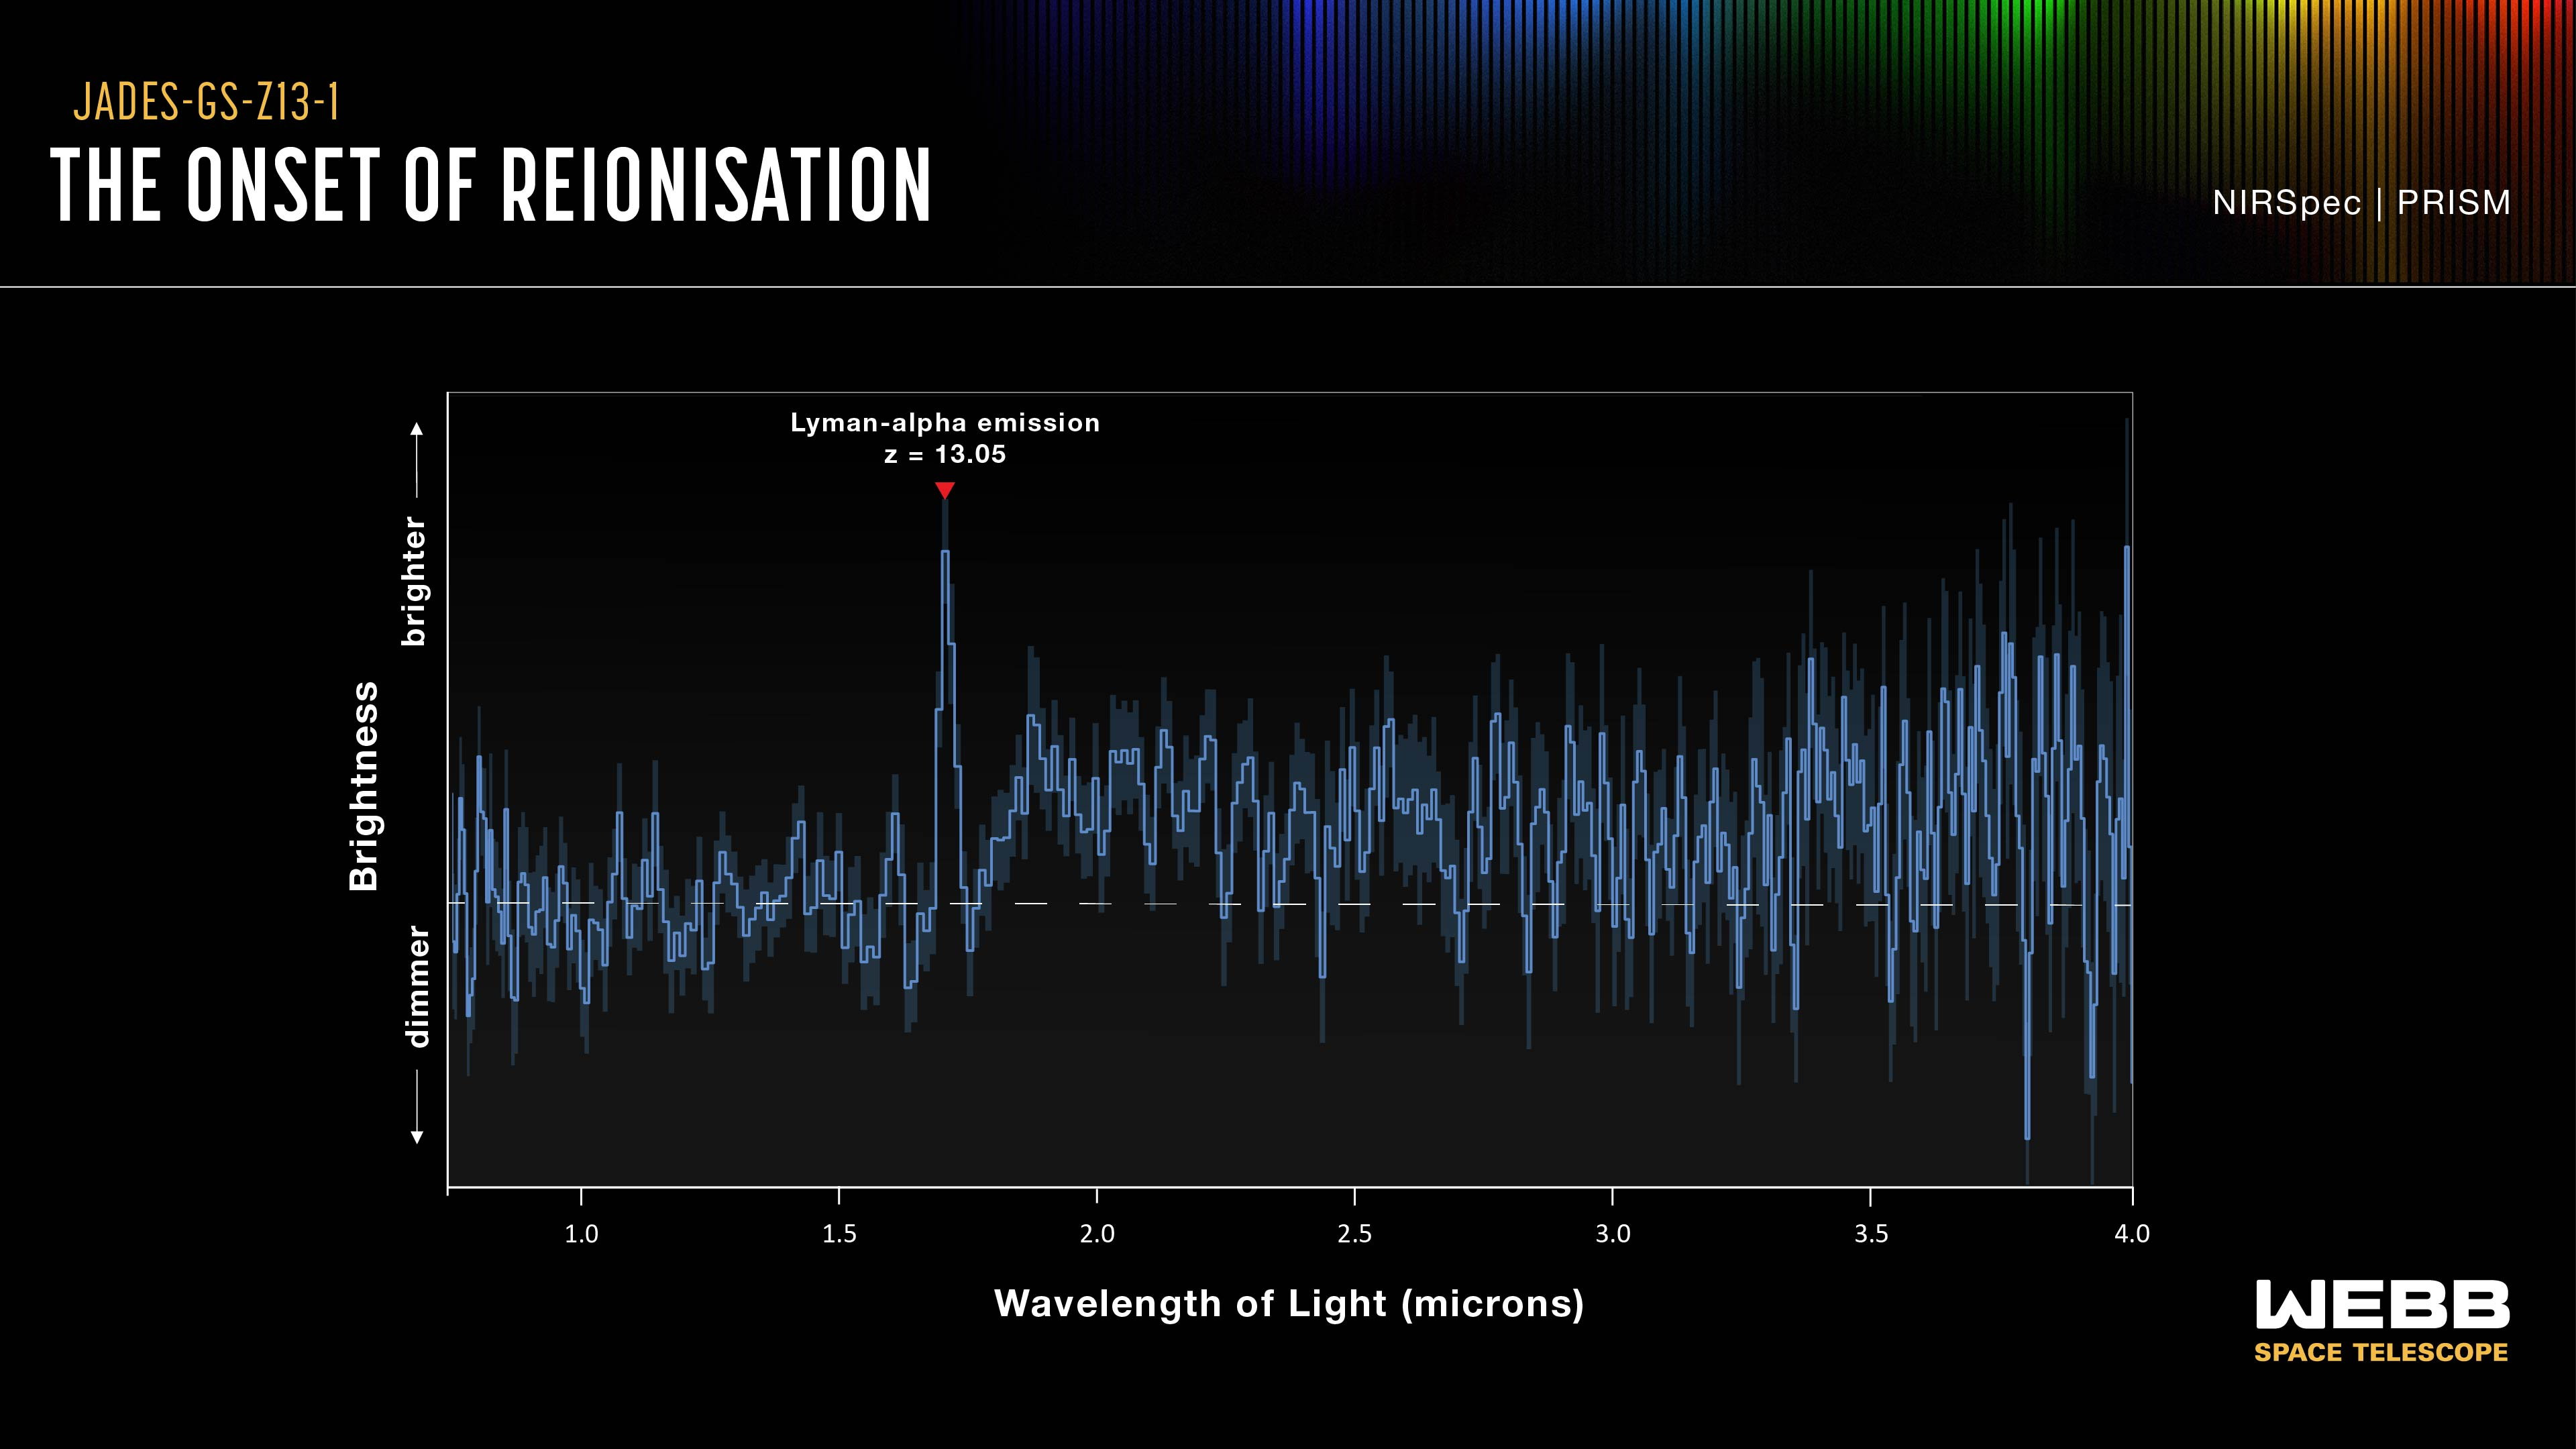

JADES-GS-z13-1 spectrum graphic

The incredibly distant galaxy GS-z13-1, observed just 330 million years after the Big Bang, was initially discovered with deep imaging from the NASA/ESA/CSA James Webb Space Telescope. Now, an international team of astronomers has definitively identified powerful hydrogen emission from this galaxy at an unexpectedly early period in the Universe’s history, a probable sign that we are seeing some of the first hot stars from the dawn of the Universe.

Data from NIRCam allowed researchers to identify GS-z13-1 as an incredibly distant galaxy, and to put an estimate on its redshift value. Webb’s unique infrared sensitivity is necessary to observe galaxies at this extreme distance, whose light has been redshifted into infrared wavelengths during its long journey across the cosmos.

To confirm the galaxy’s redshift, the team turned to Webb’s Near-Infrared Spectrograph (NIRSpec) instrument. This graphic shows the light from galaxy GS-z13-1, dispersed by NIRSpec into its component near-infrared wavelengths. This graphic indicates very bright Lyman-α emission from the galaxy, which has been redshifted to an infrared wavelength. Not only does this emission in GS-z13-1’s spectrum confirm the galaxy's extreme redshift, it is a telltale sign of the presence of newly forming stars, or a possible active galactic nucleus in the galaxy. Appearing at a much earlier time than astronomers had thought possible, the discovery of this Lyman-α emission holds great implications for our understanding of the Universe.

Credit: ESA/Webb, NASA, CSA, STScI, J. Olmsted (STScI), S. Carniani (Scuola Normale Superiore), P. Jakobsen